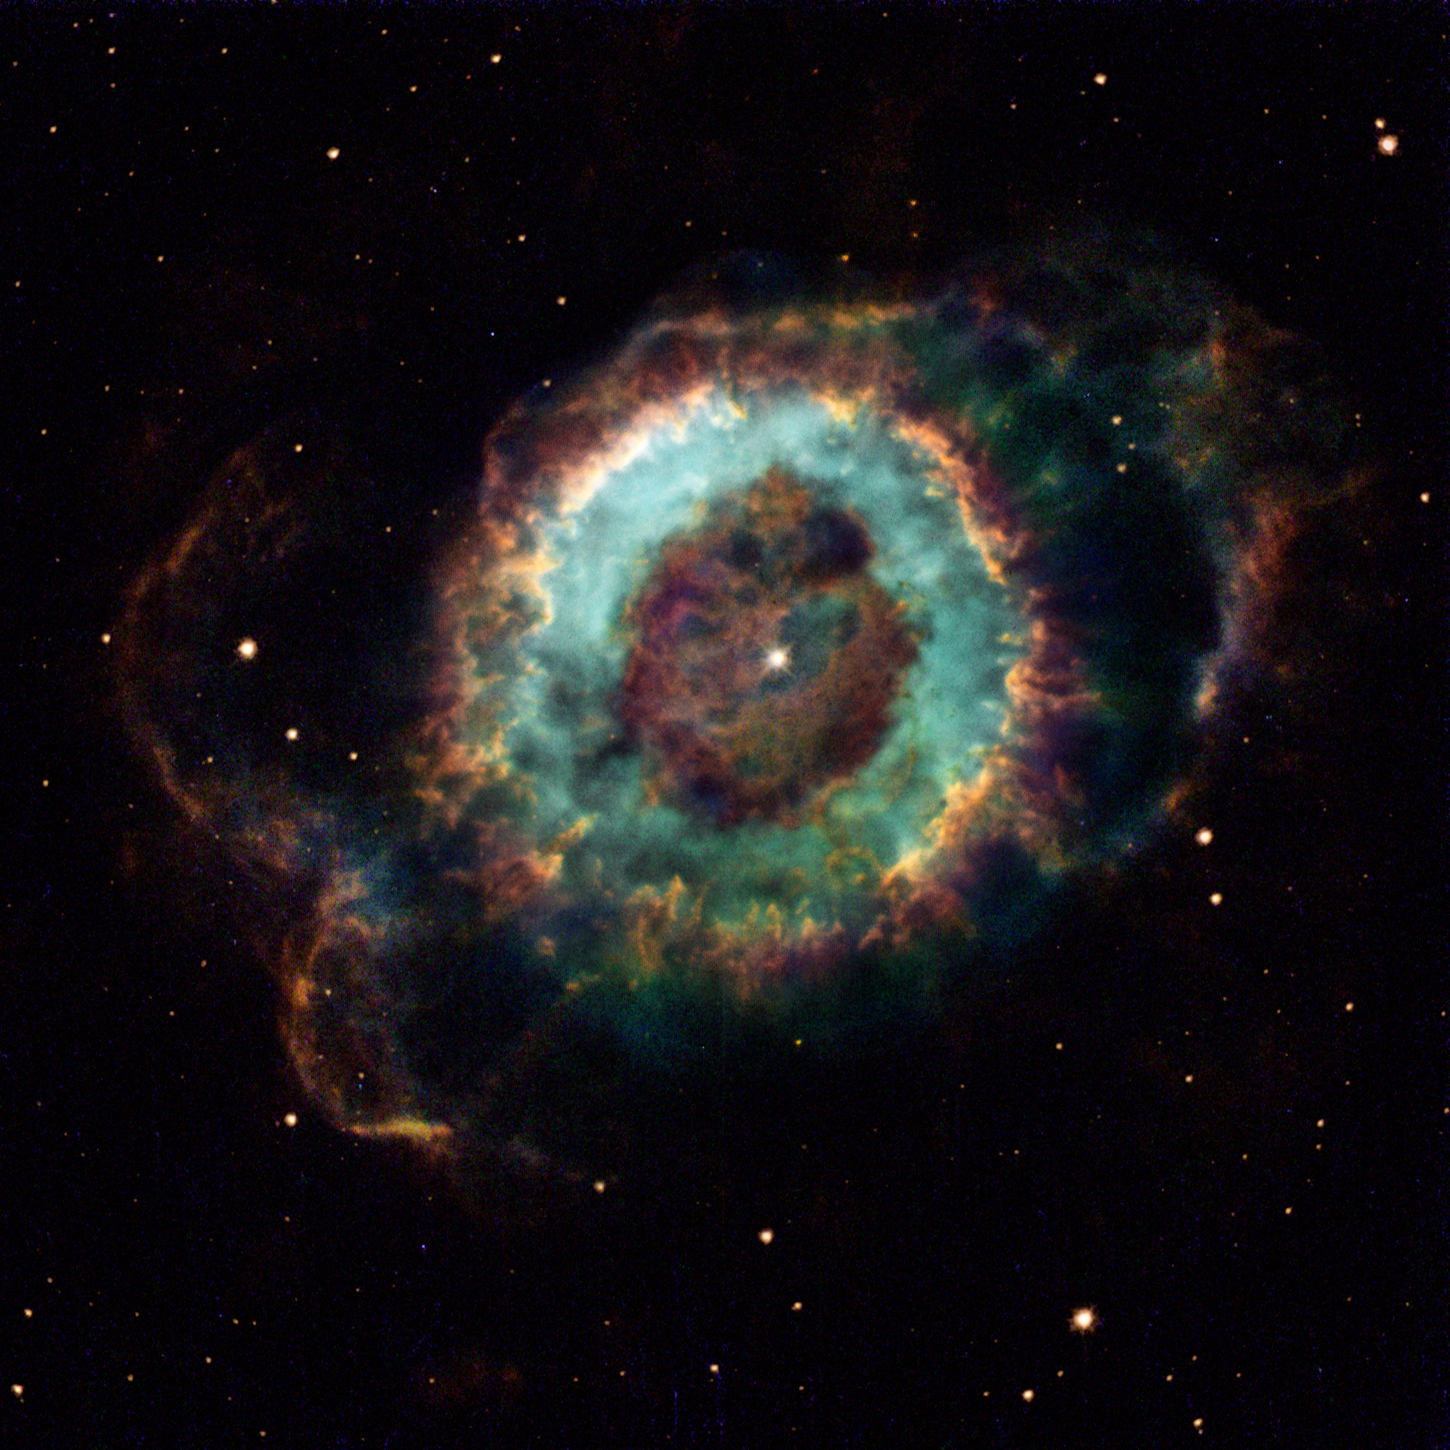

Hubble - The Ghostbuster

The NASA/ESA Hubble Space Telescope has caught a glimpse of a colorful cosmic ghost, the glowing remains of a dying star called NGC 6369. The glowing apparition is known to amateur astronomers as the 'Little Ghost Nebula', because it appears as a small, ghostly cloud surrounding the faint, dying central star.

Credit: NASA/ESA and The Hubble Heritage Team (STScI/AURA)